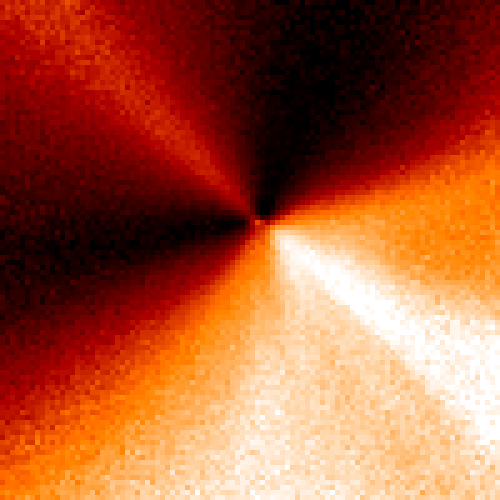

Inner Region of Comet Hyakutake

The image of the comet has been processed to emphasize the jets.

Credit: H. A. Weaver (Applied Research Corp.), HST Comet Hyakutake Observing Team, and NASA/ESA